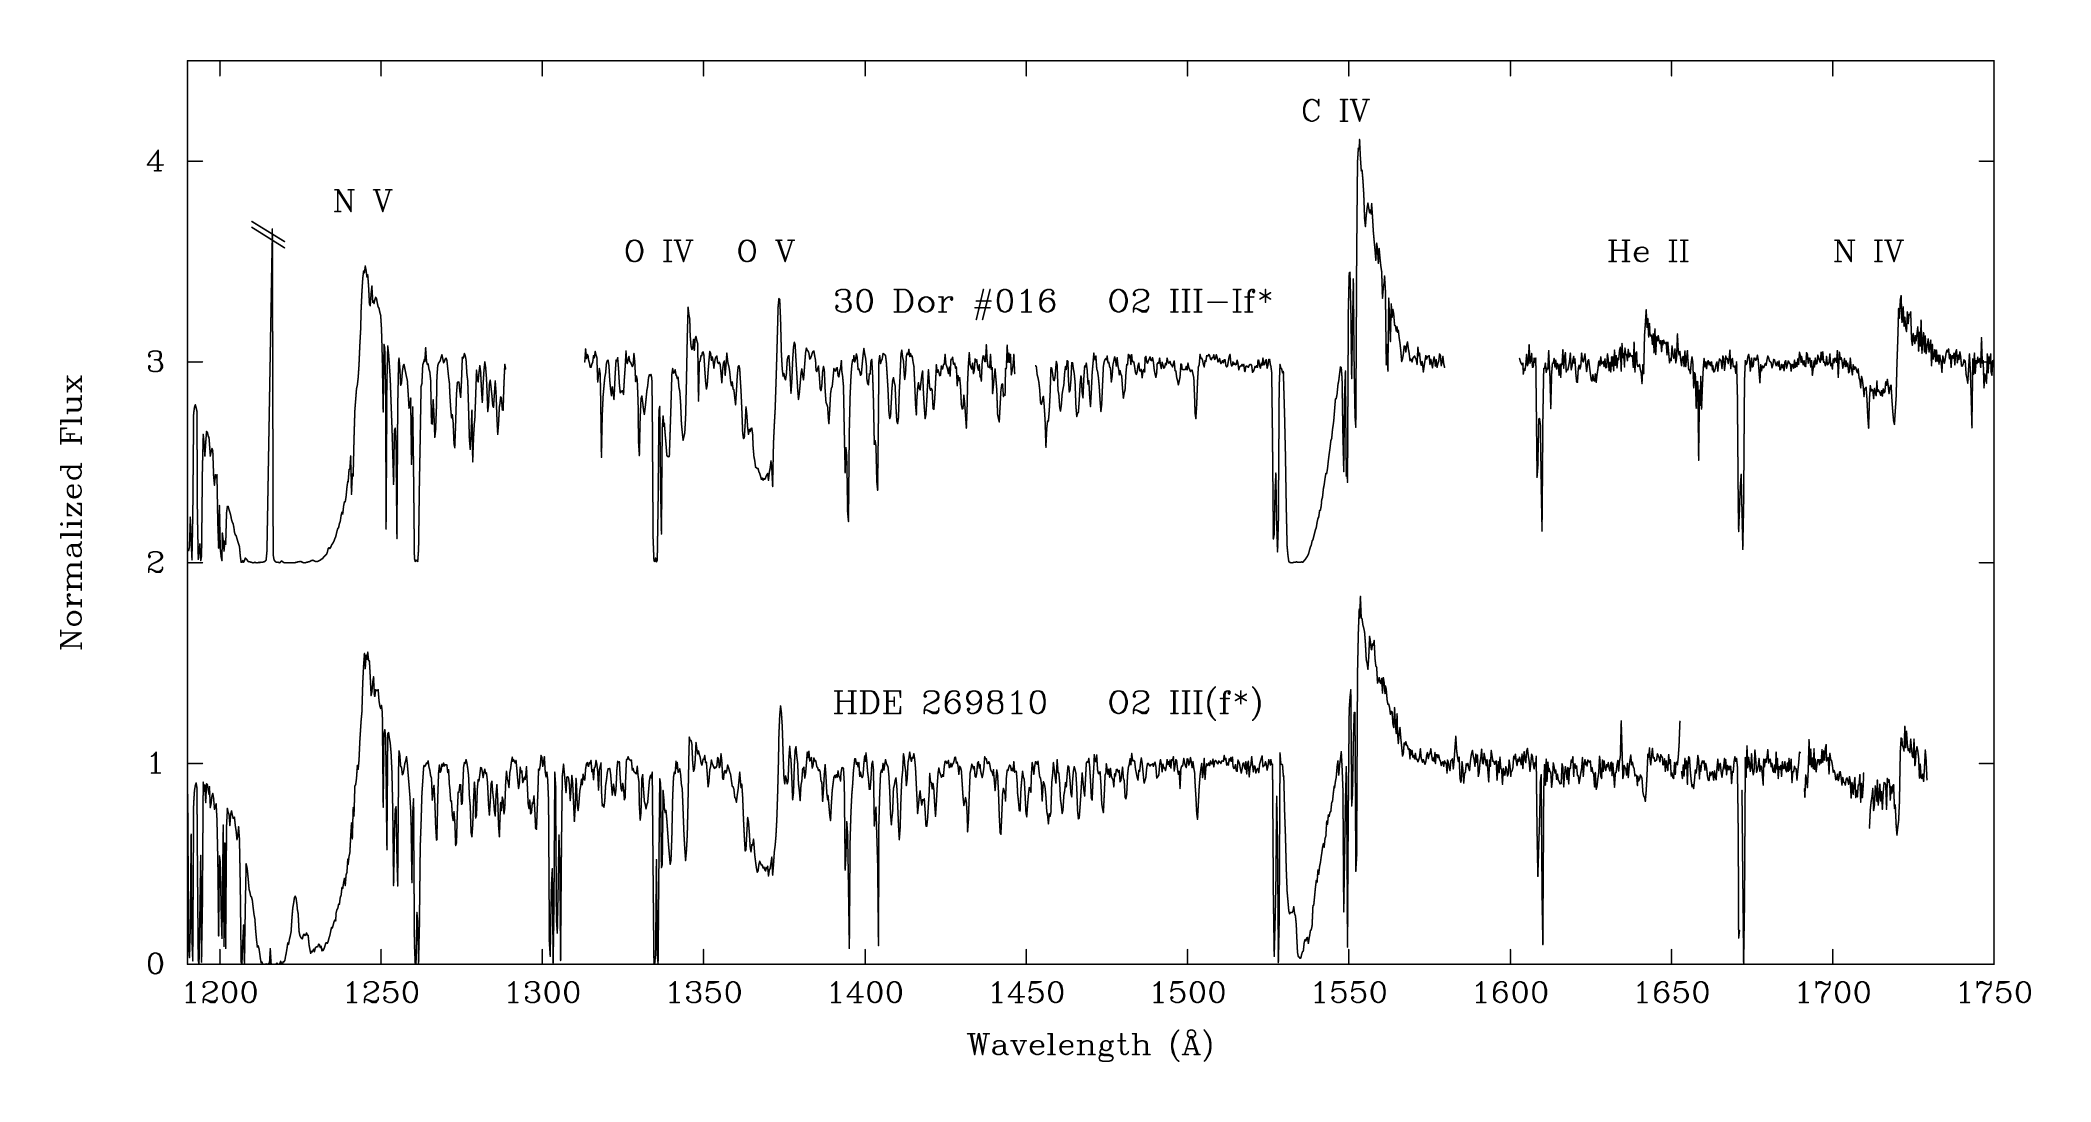

Hubble observations of massive stars in the Large Magellanic Cloud

The stellar-wind features of helium, carbon, oxygen, and nitrogen are identified by their chemical symbols above; the roman numerals indicate the ionisation stages, i.e., the number of electrons removed plus one. (“I” would indicate the neutral atom.) The broad emission components plus blue-shifted absorption are diagnostics of the stellar winds; the absorption forms along the line of sight to the stellar disk, where the wind is approaching us at its full speed.

The O V line is a unique feature of the hottest (O2-O3) stars.

Credit: NASA, ESA, C. Evans (Royal Observatory Edinburgh), N.Walborn (STScI) and D. Lennon (ESA/STScI)